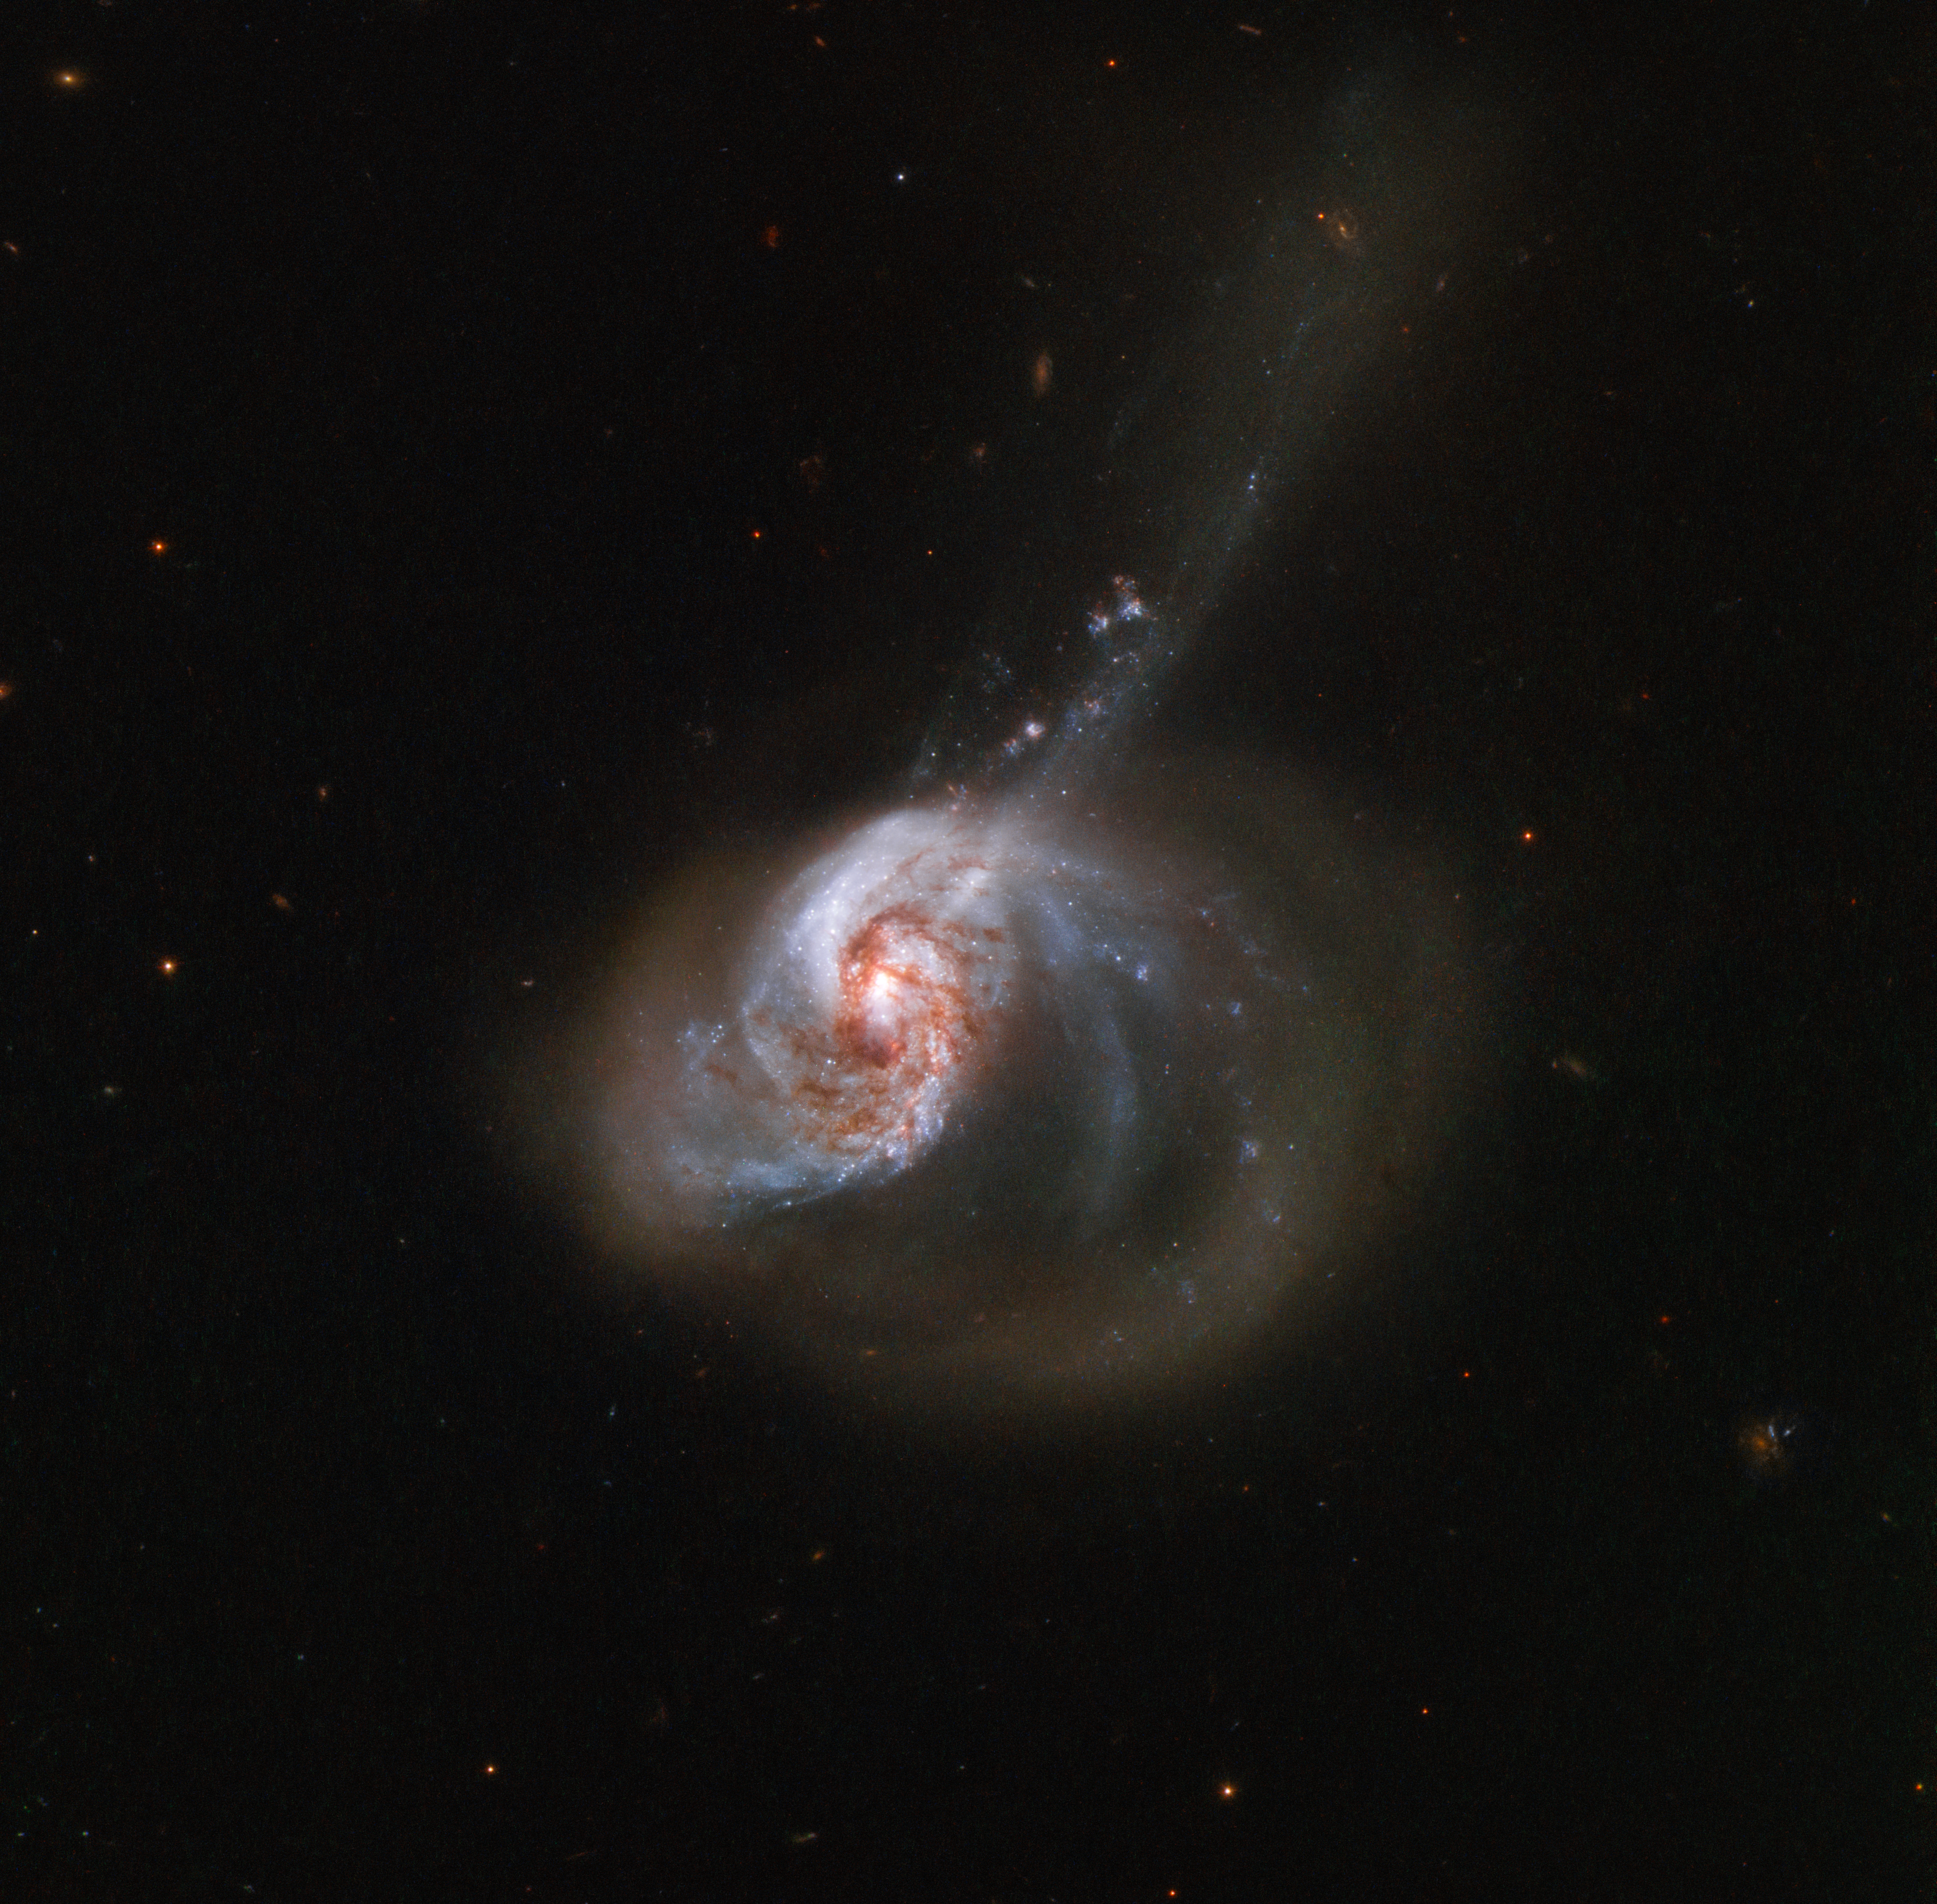

Ring of Stellar Wildfire

NGC 1614, captured here by the NASA/ESA Hubble Space Telescope, is an eccentrically-shaped galaxy ablaze with activity. The galaxy resides about 200 million light-years from Earth and is nestled in the southern constellation of Eridanus (The River).

NGC 1614 is the result of a past galactic merger which created its peculiar appearance. The cosmic collision also drove a turbulent flow of interstellar gas from the smaller of the two galaxies involved into the nucleus of the larger one, resulting in a burst of star formation which started in the core and slowly spread outwards through the galaxy.

Owing to its turbulent past and its current appearance, astronomers classify NGC 1614 as a peculiar galaxy, a starburst galaxy, and a luminous infrared galaxy. Luminous infrared galaxies are among the most luminous objects in the local Universe — and NGC 1614 is, in fact, the second most luminous galaxy within 250 million light-years.

Credit: ESA/Hubble & NASA, A. Adamo